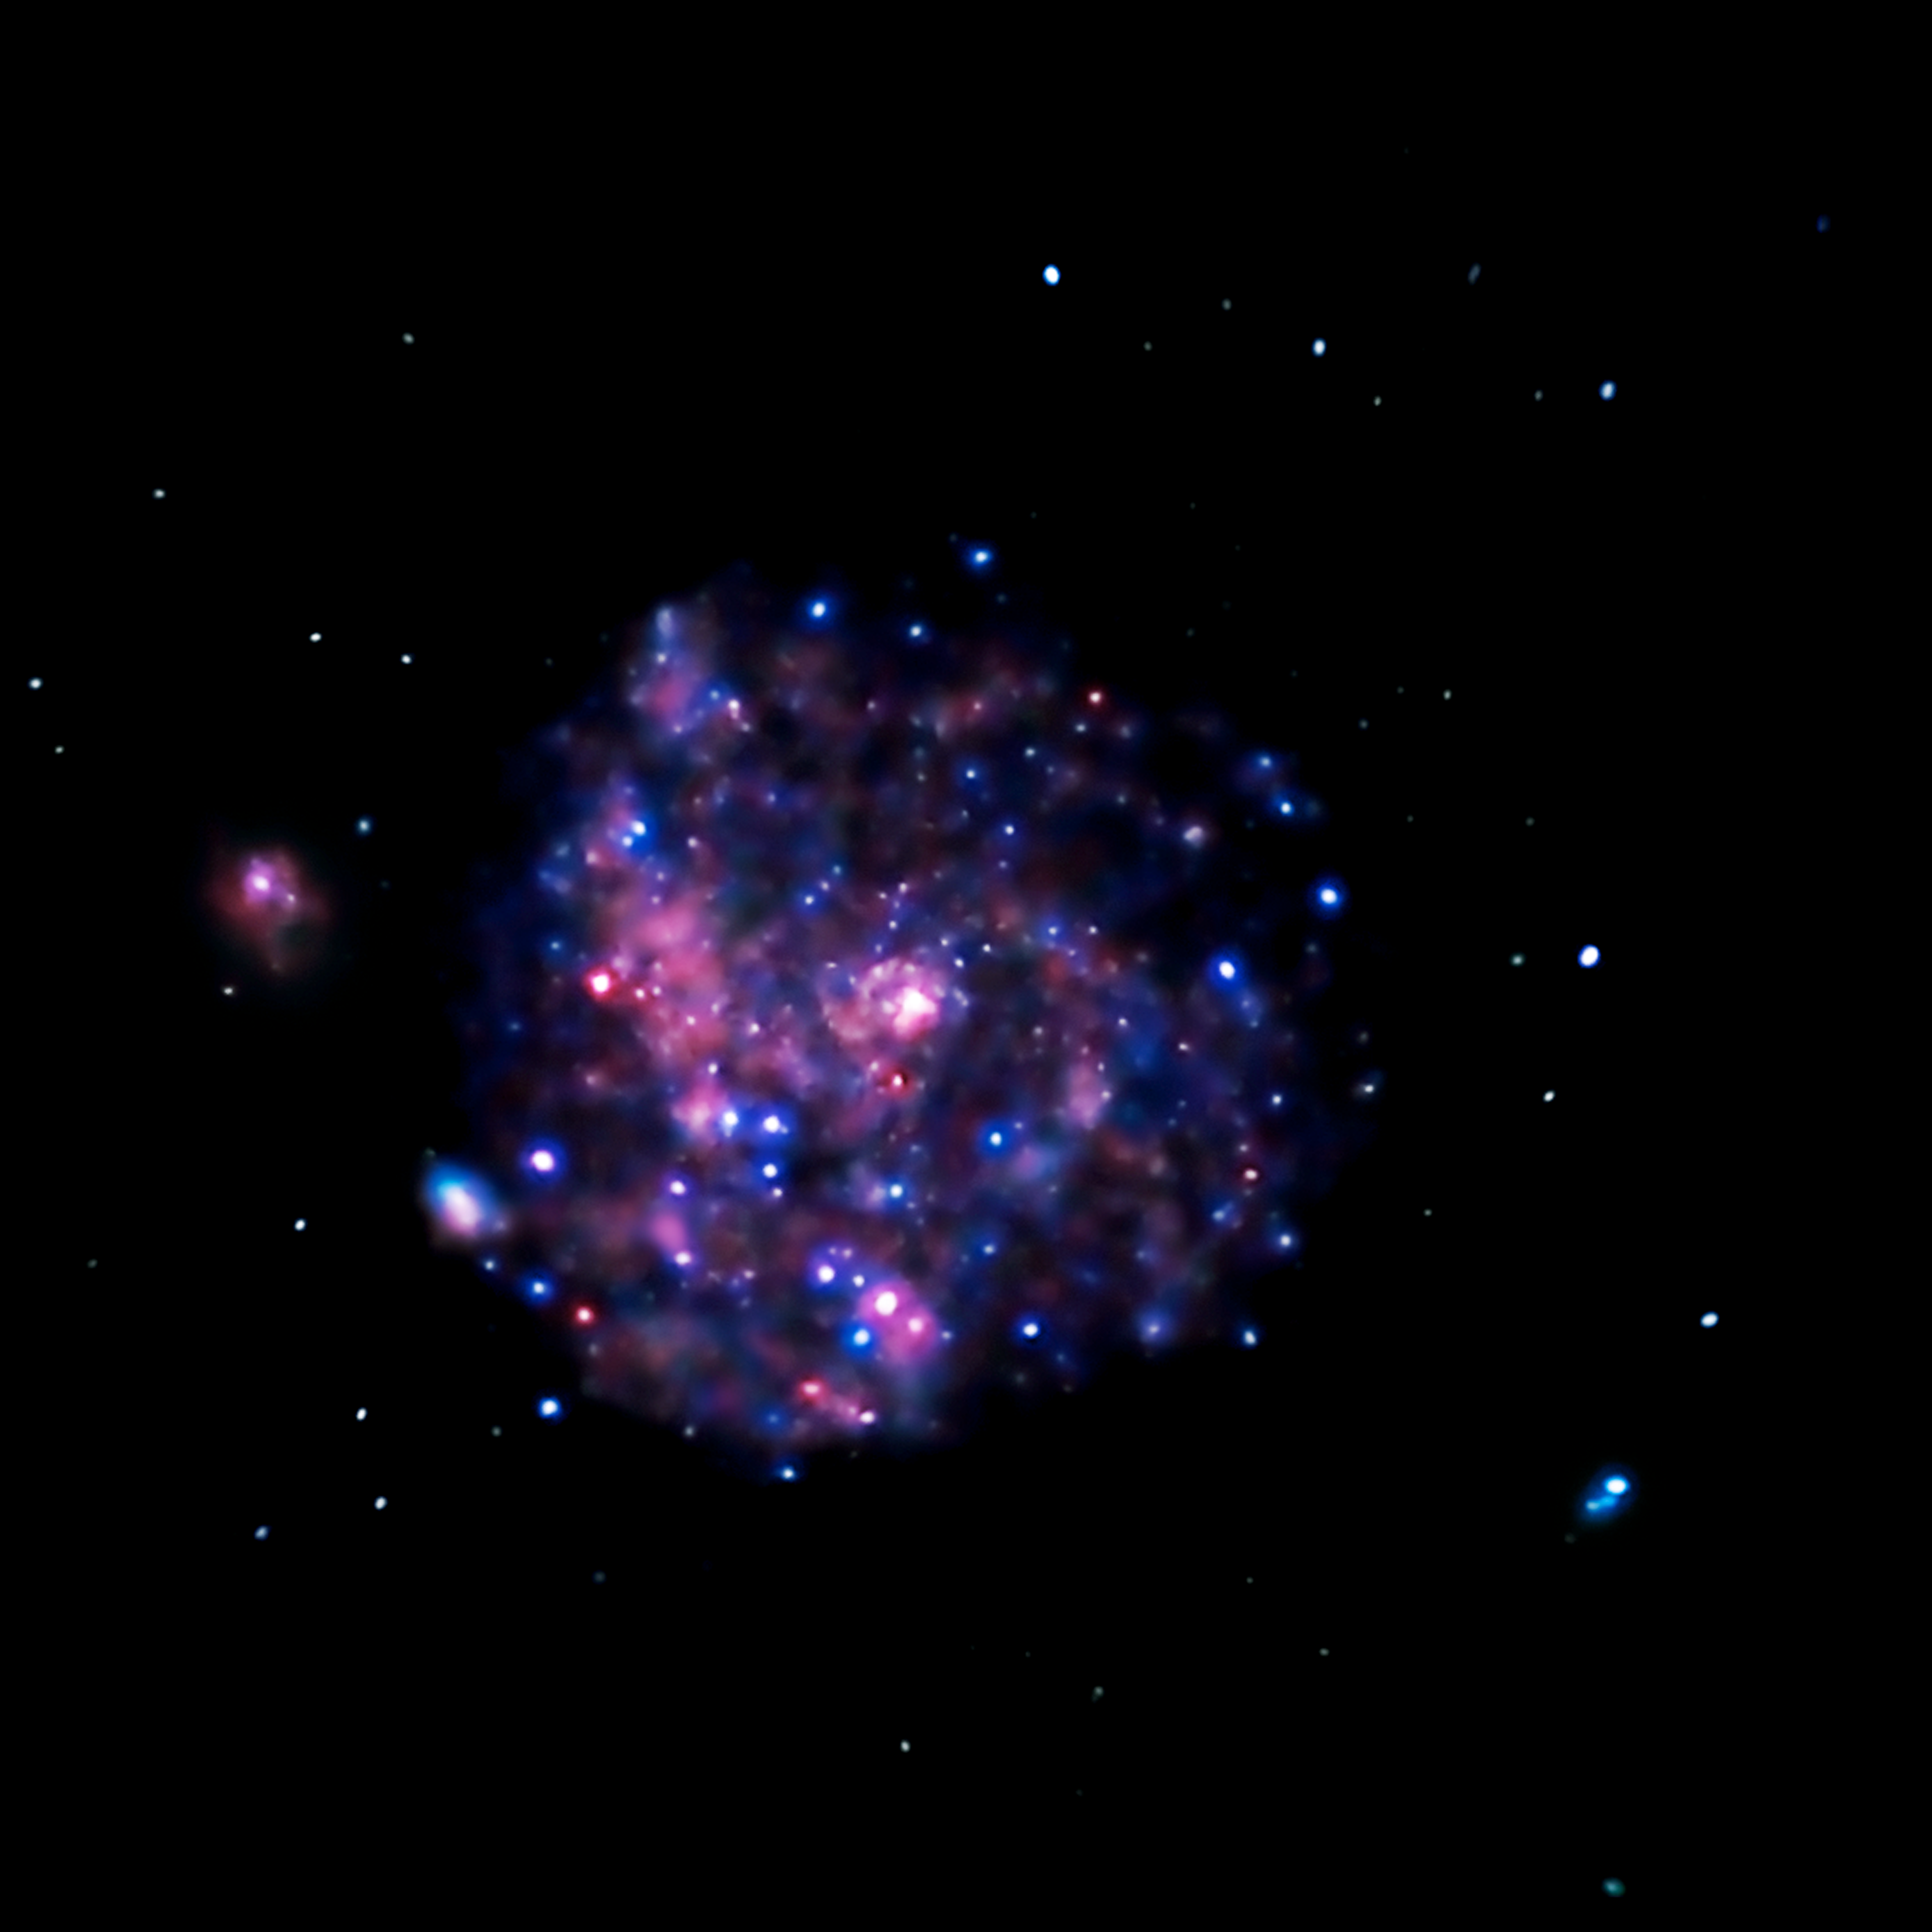

Chandra image of M101

Chandra's image of Messier 101, taken in X-ray light, shows the high-energy features of this spiral galaxy. X-rays are generally created in violent and/or high-temperature events. The white dots are X-ray sources that include the remains of exploded stars as well as material colliding at extreme speeds around black holes. The pink and blue colours are emission from million-degree gas and from clusters of massive stars. The pink emission indicates lower-energy X-rays and the blue higher-energy X-rays. One reason astronomers study Messier 101's X-rays is to better understand how black holes grow in spiral galaxies.

Credit: NASA, CXC and K. Kuntz (JHU)